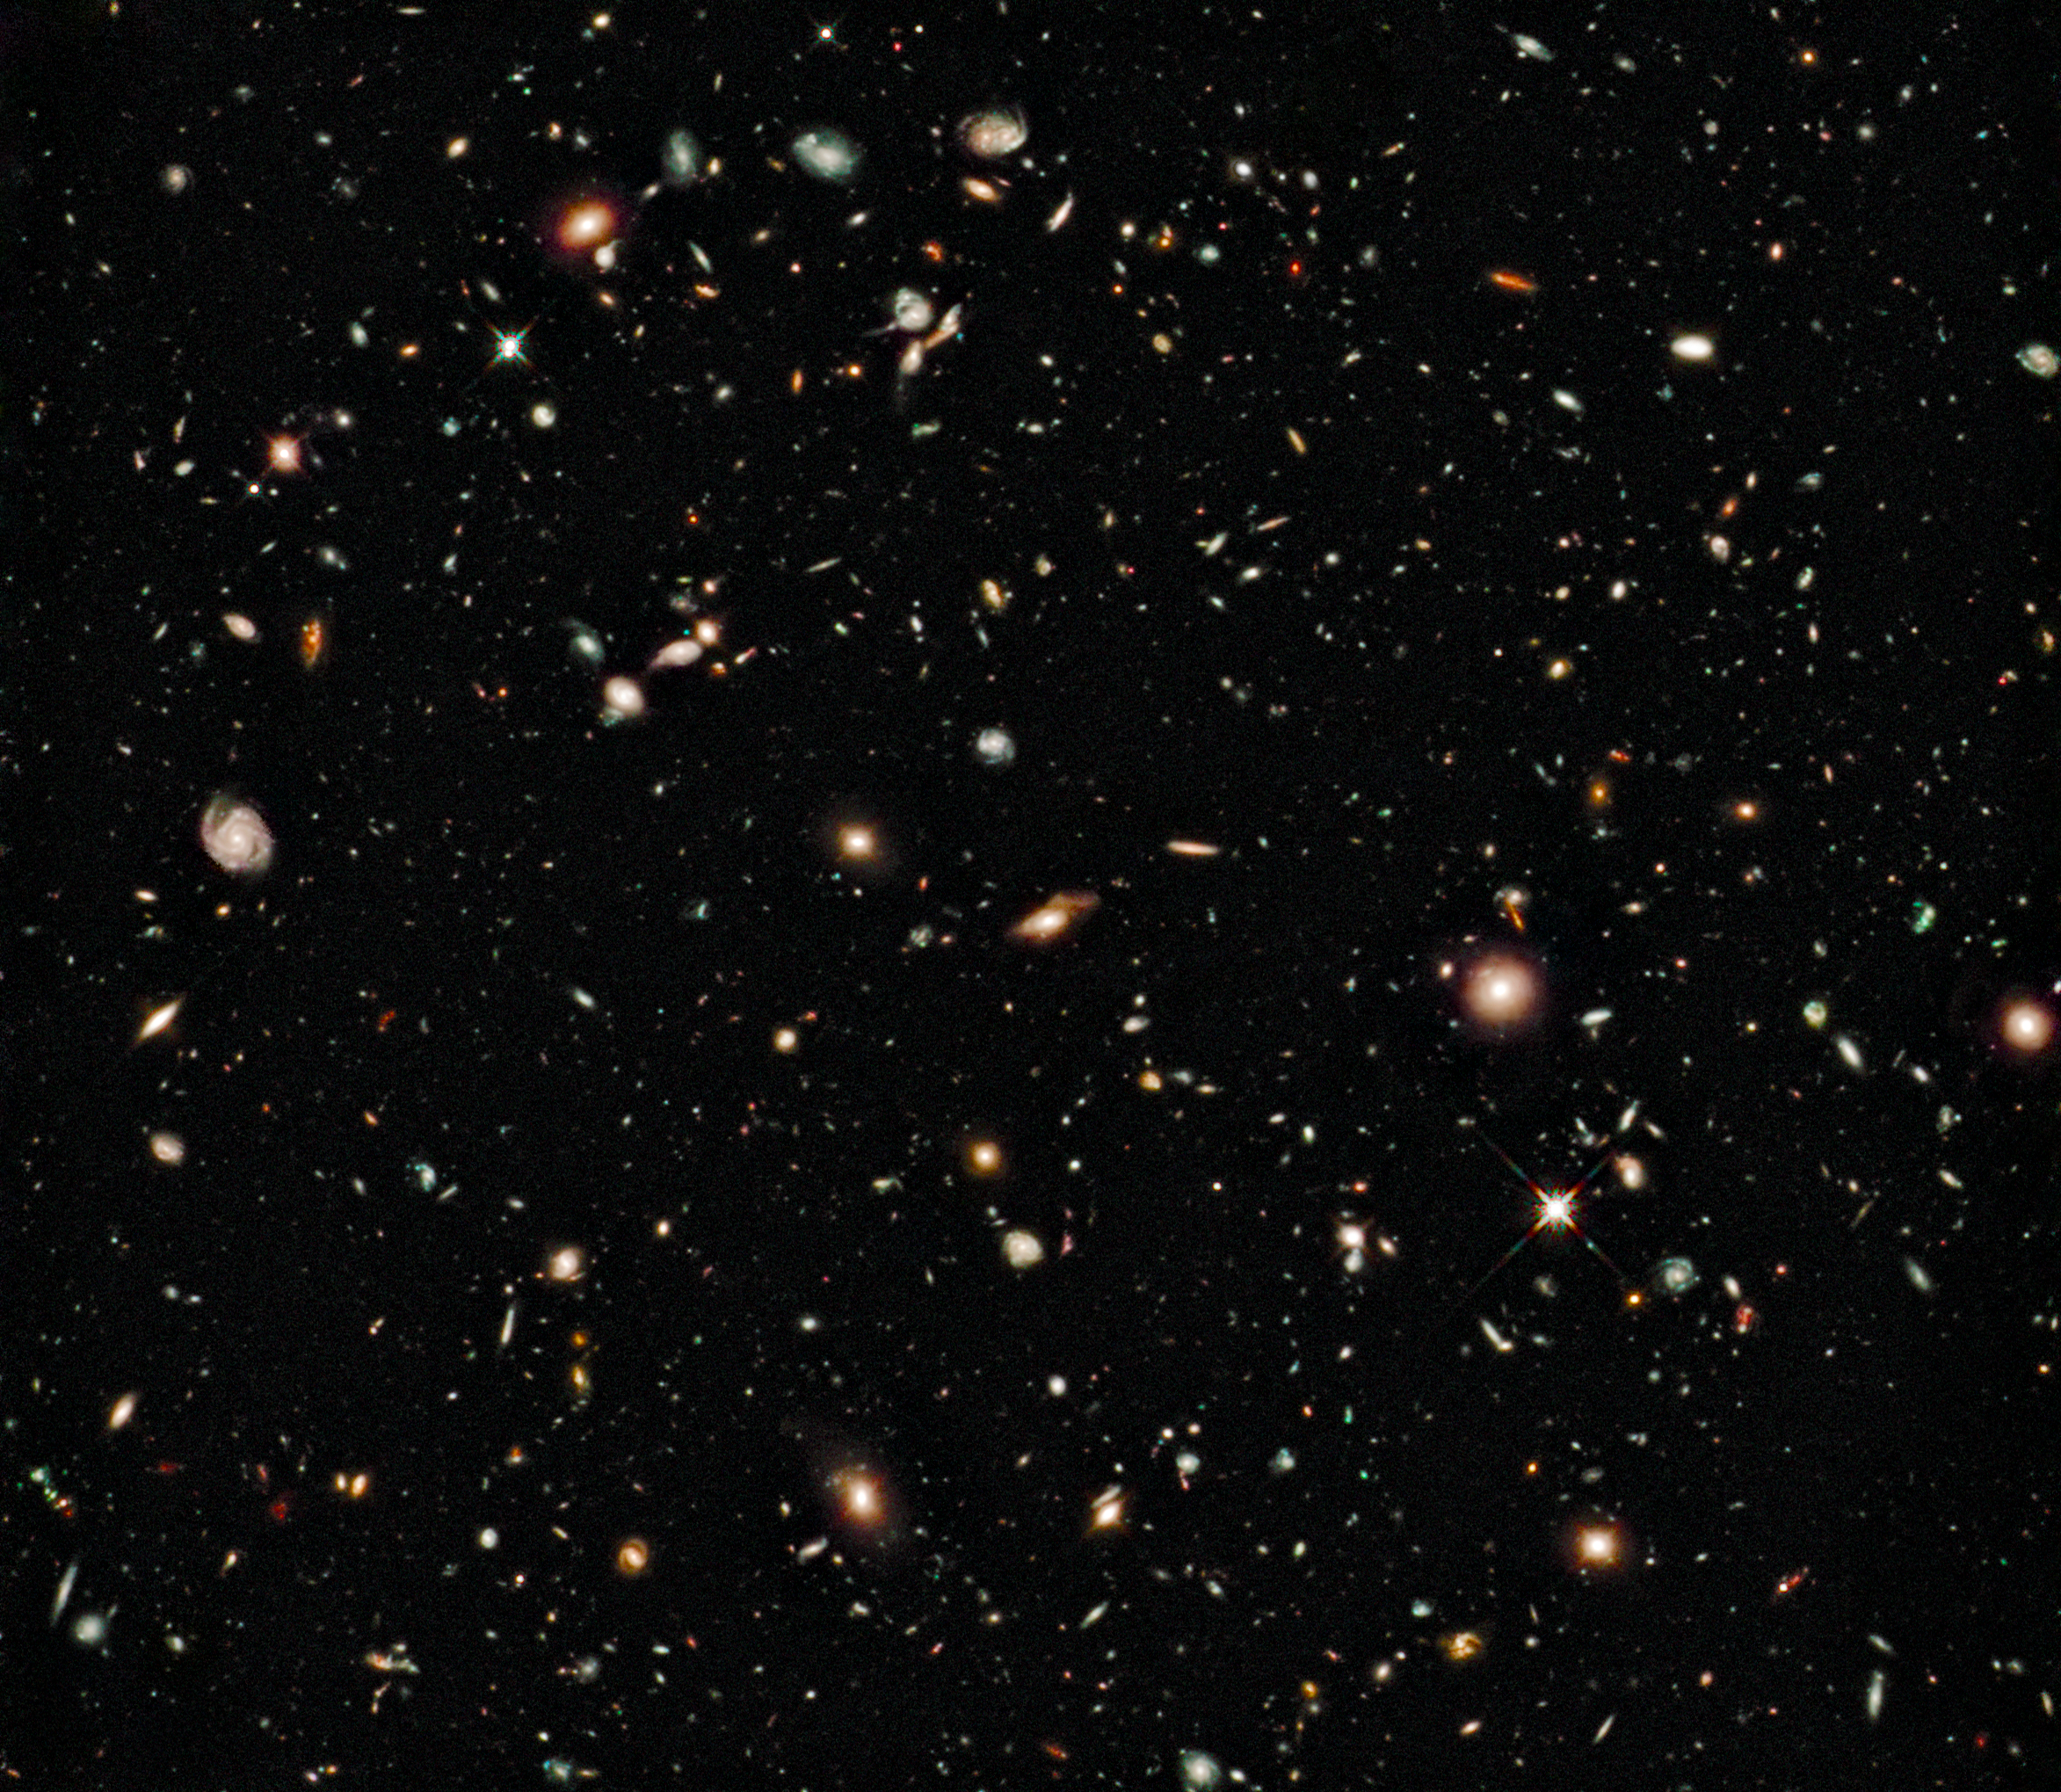

Hubble sees oldest galaxies yet

In 2004, Hubble created the deepest visible-light image of the Universe and now, with its brand-new camera, Hubble is seeing even farther in the same region. Hubble's newly installed Wide Field Camera 3 (WFC3) collects light from near-infrared wavelengths and therefore looks even deeper, because the light from hot young stars in very distant galaxies is stretched out of the ultraviolet and visible regions of the spectrum into near-infrared wavelengths by the expansion of the Universe. The new deep view also provides insights into how galaxies grew in their formative years early in the Universe's history.

This image is a composite of separate exposures made by the WFC3 instrument on the Hubble Space Telescope. Three filters were used to sample broad wavelength ranges in the near-infrared. The colour results from assigning different colours to each monochromatic image. In this case, the assigned colours are: F105W (Y) blue, F125W (J) green and F160 (H) red.

The image is roughly 2.4 arcminutes wide.

Credit: NASA, ESA, G. Illingworth (UCO/Lick Observatory and the University of California, Santa Cruz), R. Bouwens (UCO/Lick Observatory and Leiden University) and the HUDF09 Team